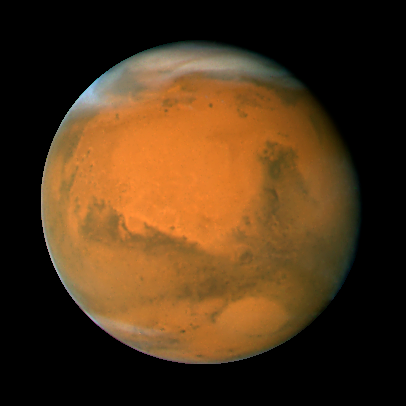

Mars on Dec. 3, 2007; longitude ~320 degrees

Mars observation taken on Dec. 3, 2007; longitude ~320 degrees

Credit: NASA, ESA, the Hubble Heritage Team (STScI/AURA), J. Bell (Cornell University), and M. Wolff (Space Science Institute, Boulder)